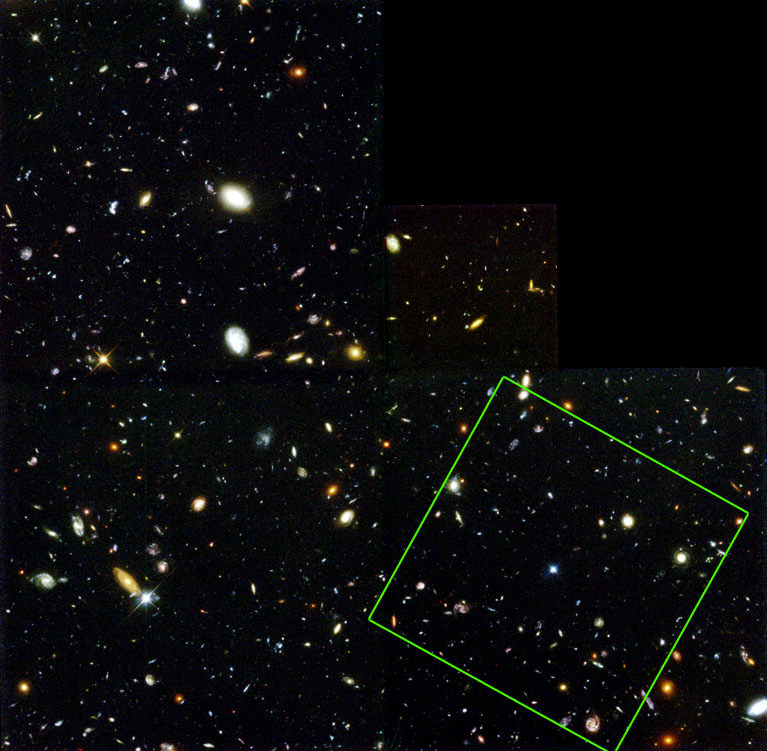

Location of NICMOS field on WFPC2 HDF

Location of NICMOS field on WFPC2 HDF

Credit: Rodger I. Thompson (University of Arizona) and NASA/ESA